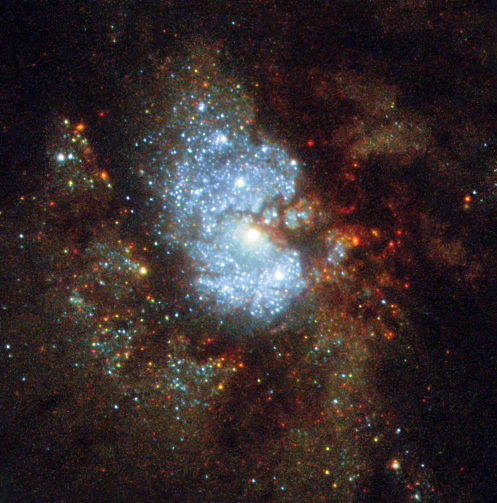

Hubble’s Hidden Galaxy

IC 342 is a challenging cosmic target. Although it is bright, the galaxy sits near the equator of the Milky Way’s galactic disc, where the sky is thick with glowing cosmic gas, bright stars, and dark, obscuring dust. In order for astronomers to see the intricate spiral structure of IC 342, they must gaze through a large amount of material contained within our own galaxy — no mean feat! As a result IC 342 is relatively difficult to spot and image, giving rise to its intriguing nickname: the “Hidden Galaxy”.

Located very close (in astronomical terms!) to the Milky Way, this sweeping spiral galaxy would be among the brightest in the sky were it not for its dust-obscured location. The galaxy is very active, as indicated by the range of colours visible in this NASA/ESA Hubble Space Telescope image, depicting the very central region of the galaxy. A beautiful mixture of hot, blue star-forming regions, redder, cooler regions of gas, and dark lanes of opaque dust can be seen, all swirling together around a bright core. In 2003, astronomers confirmed this core to be a specific type of central region known as an HII nucleus — a name that indicates the presence of ionised hydrogen — that is likely to be creating many hot new stars.

Credit: ESA/Hubble & NASA